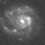

Galaxies: snapshots in time

Single images from the Galaxies: Snapshots in Time collage.

Credit: NASA & ESA